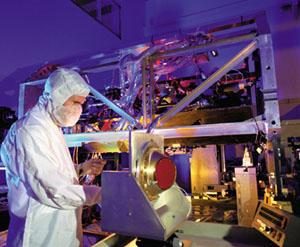

Advanced Camera for Surveys (ACS)

Here we see an instrument, called Advanced Camera for Surveys or ACS, which is going to be installed during Servicing Mission 3B.

Credit: Ball Aerospace